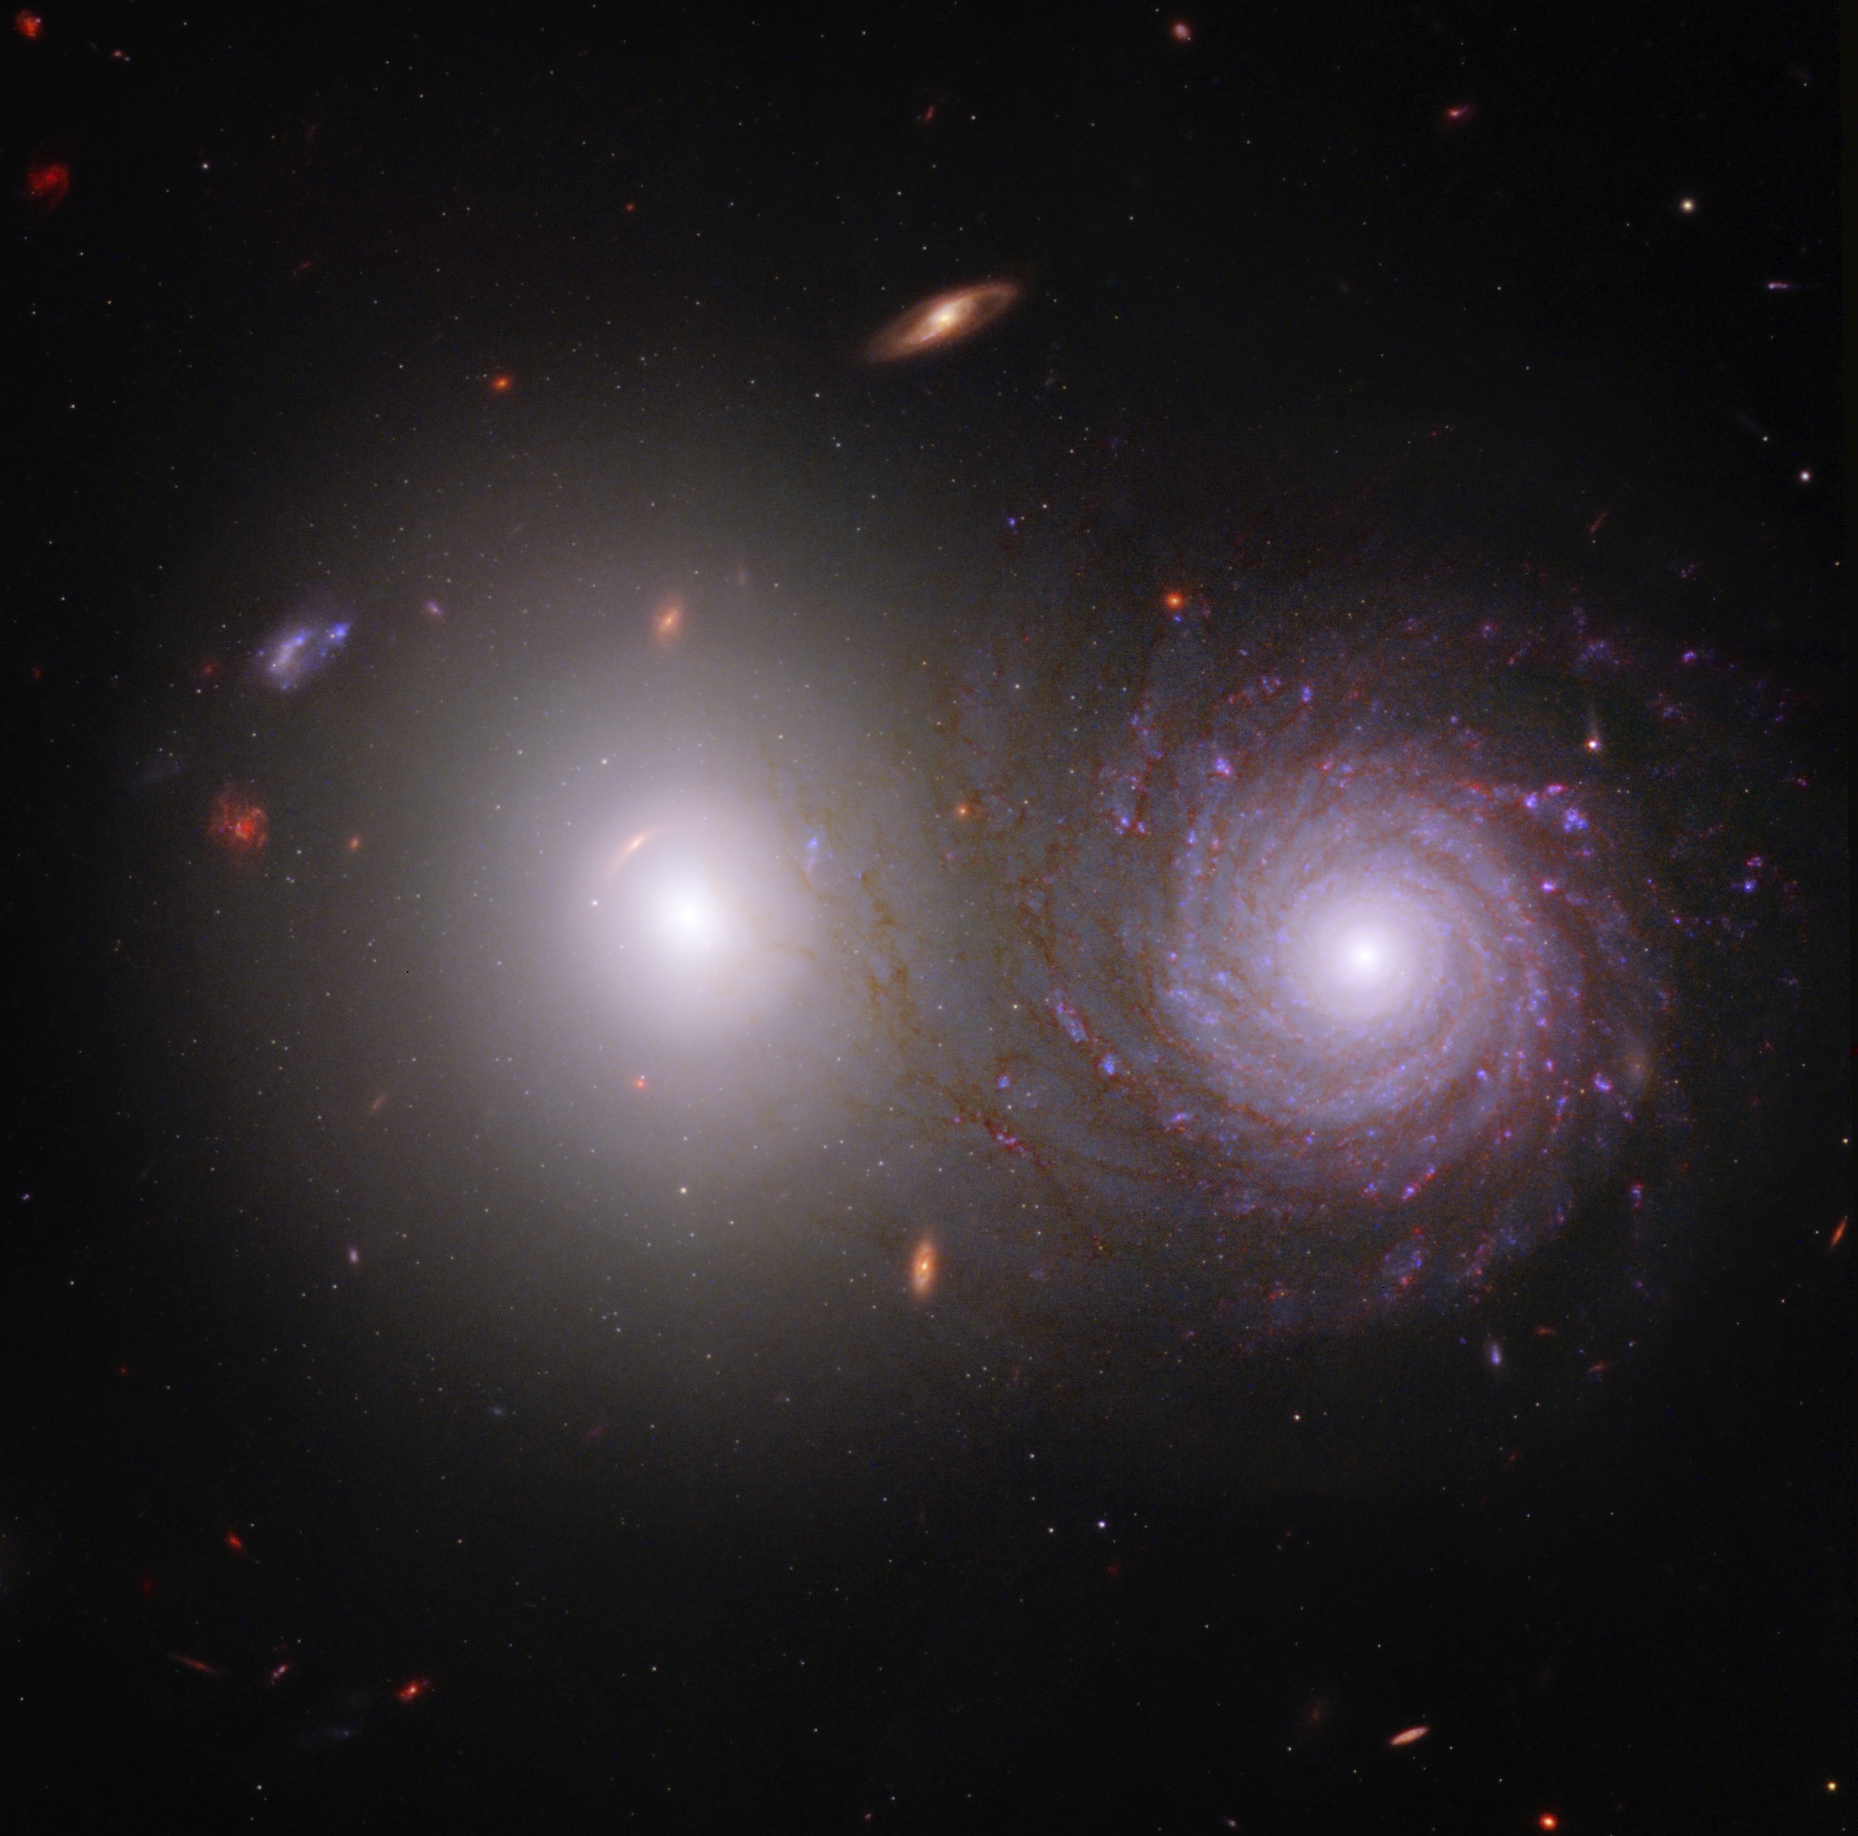

Galaxy Pair VV 191 (Webb and Hubble Composite Image)

By combining data from the NASA/ESA/CSA James Webb Space Telescope and the NASA/ESA Hubble Space Telescope, researchers were able to trace light that was emitted by the large white elliptical galaxy at left through the spiral galaxy at right and identify the effects of interstellar dust in the spiral galaxy. This image of galaxy pair VV 191 includes near-infrared light from Webb, and ultraviolet and visible light from Hubble.

Webb’s near-infrared data also show us the galaxy’s longer, extremely dusty spiral arms in far more detail, giving them an appearance of overlapping with the central bulge of the bright white elliptical galaxy on the left. Although the two foreground galaxies are relatively close astronomically speaking, they are not actively interacting.

Don’t overlook the background scenery! Like many Webb images, this image of VV 191 shows many galaxies that lie great distances away. For example, two patchy spirals to the upper left of the elliptical galaxy have similar apparent sizes, but show up in very different colors. One is likely very dusty and the other very far away, but researchers need to obtain data known as spectra to determine which is which.

Note: This image highlights Webb’s science in progress, which has not yet been through the peer-review process.

Credit: NASA, ESA, CSA, Rogier Windhorst (ASU), William Keel (University of Alabama), Stuart Wyithe (University of Melbourne), JWST PEARLS Team, Alyssa Pagan (STScI)